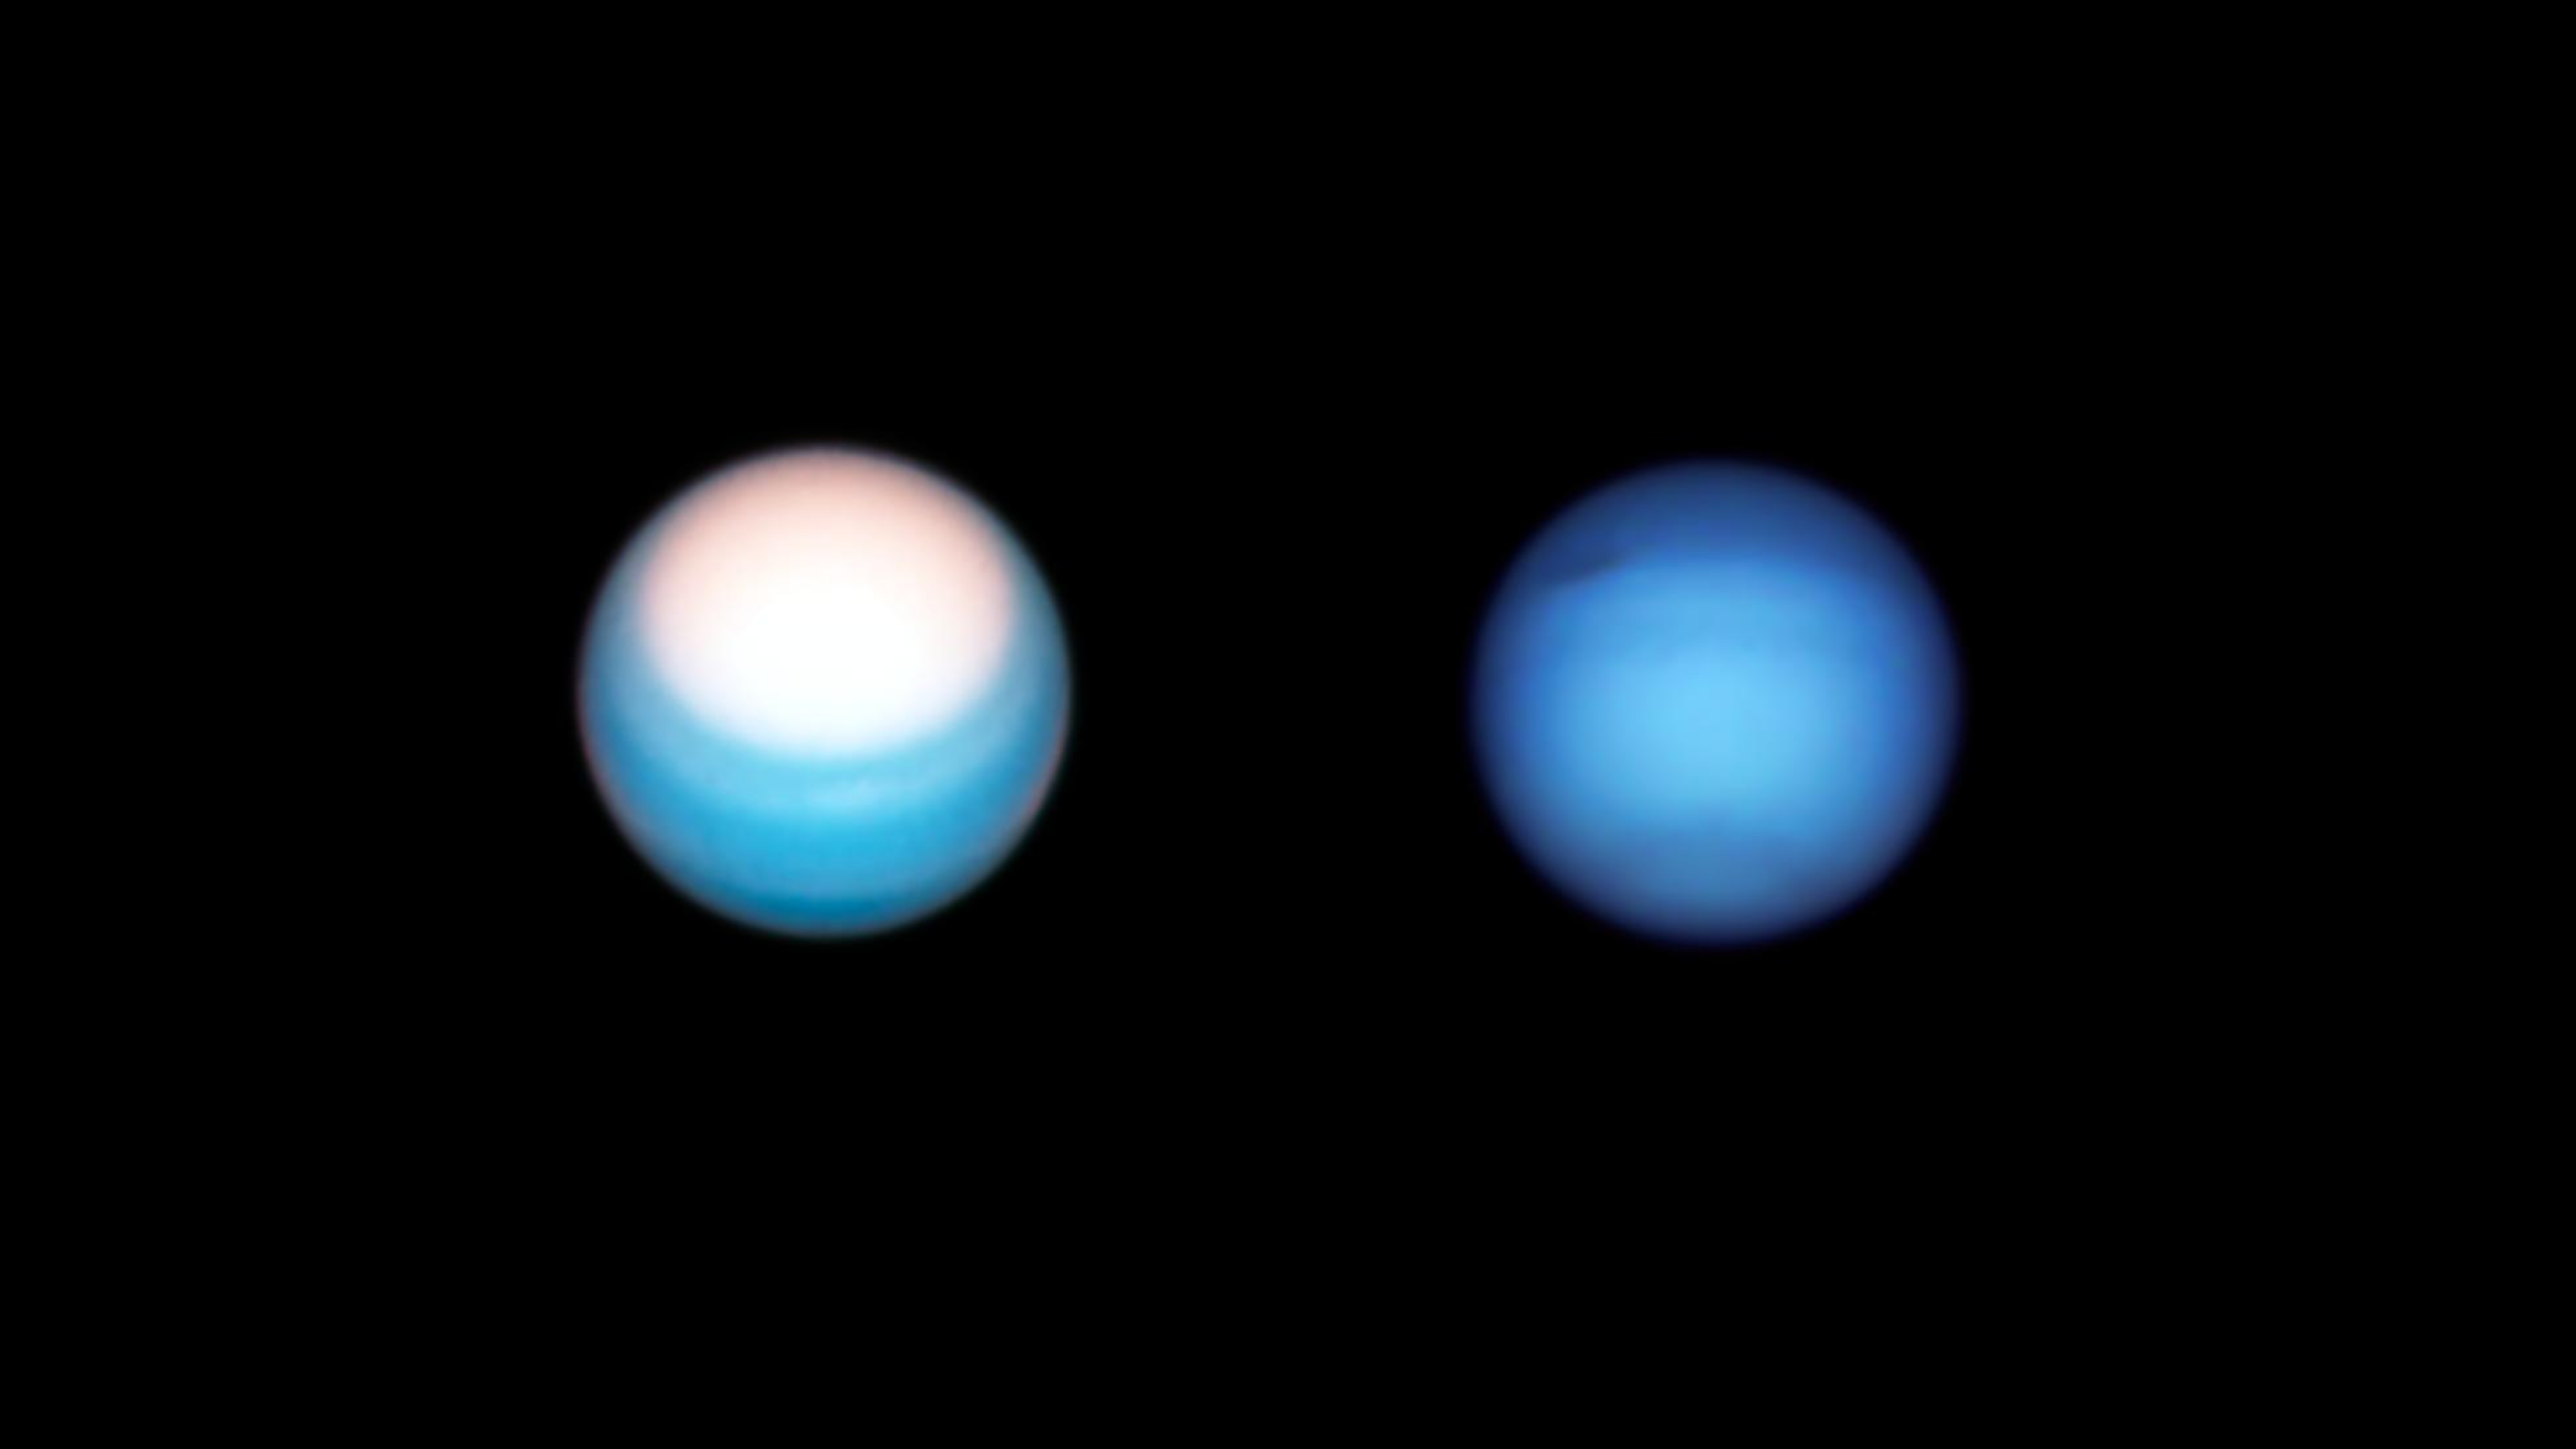

Hubble’s Observations of Uranus and Neptune in 2021

Left: Hubble’s 25 October 2021 view of Uranus puts the planet’s bright northern polar hood in the spotlight.

Right: Hubble’s 7 September 2021 view of Neptune features the planet’s dark spot and darkened northern hemisphere.

Credit: NASA, ESA, A. Simon (Goddard Space Flight Center), and M. H. Wong (University of California, Berkeley) and the OPAL team